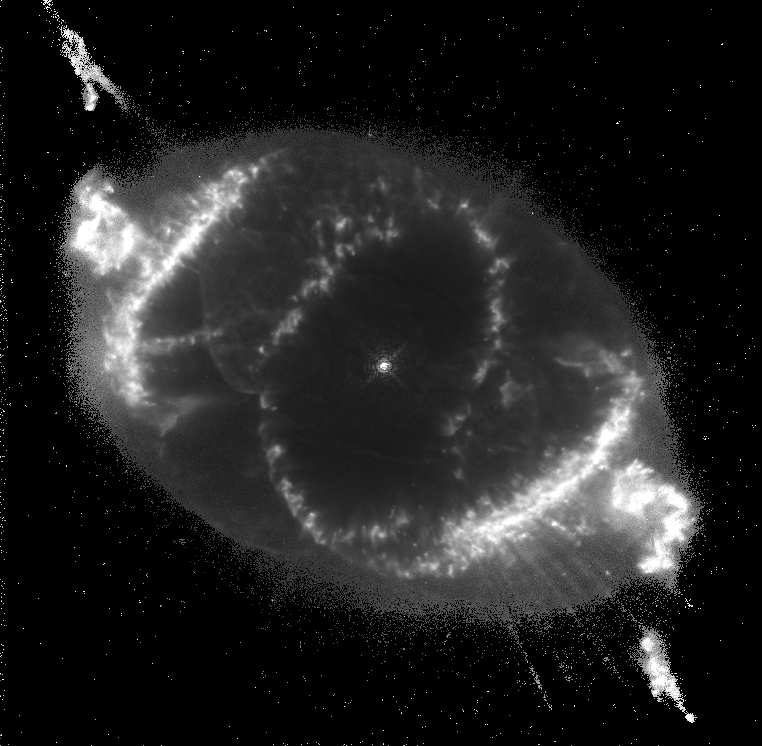

The Cat's Eye Nebula

This Hubble Space Telescope image shows one of the most complex planetary nebulae ever seen, NGC 6543, nicknamed the 'Cat's Eye Nebula.' Hubble reveals surprisingly intricate structures including concentric gas shells, jets of high-speed gas and unusual shock-induced knots of gas. Estimated to be 1, 000 years old, the nebula is a visual 'fossil record' of the dynamics and late evolution of a dying star.

Credit: J.P. Harrington and K.J. Borkowski (University of Maryland), and NASA/ESA